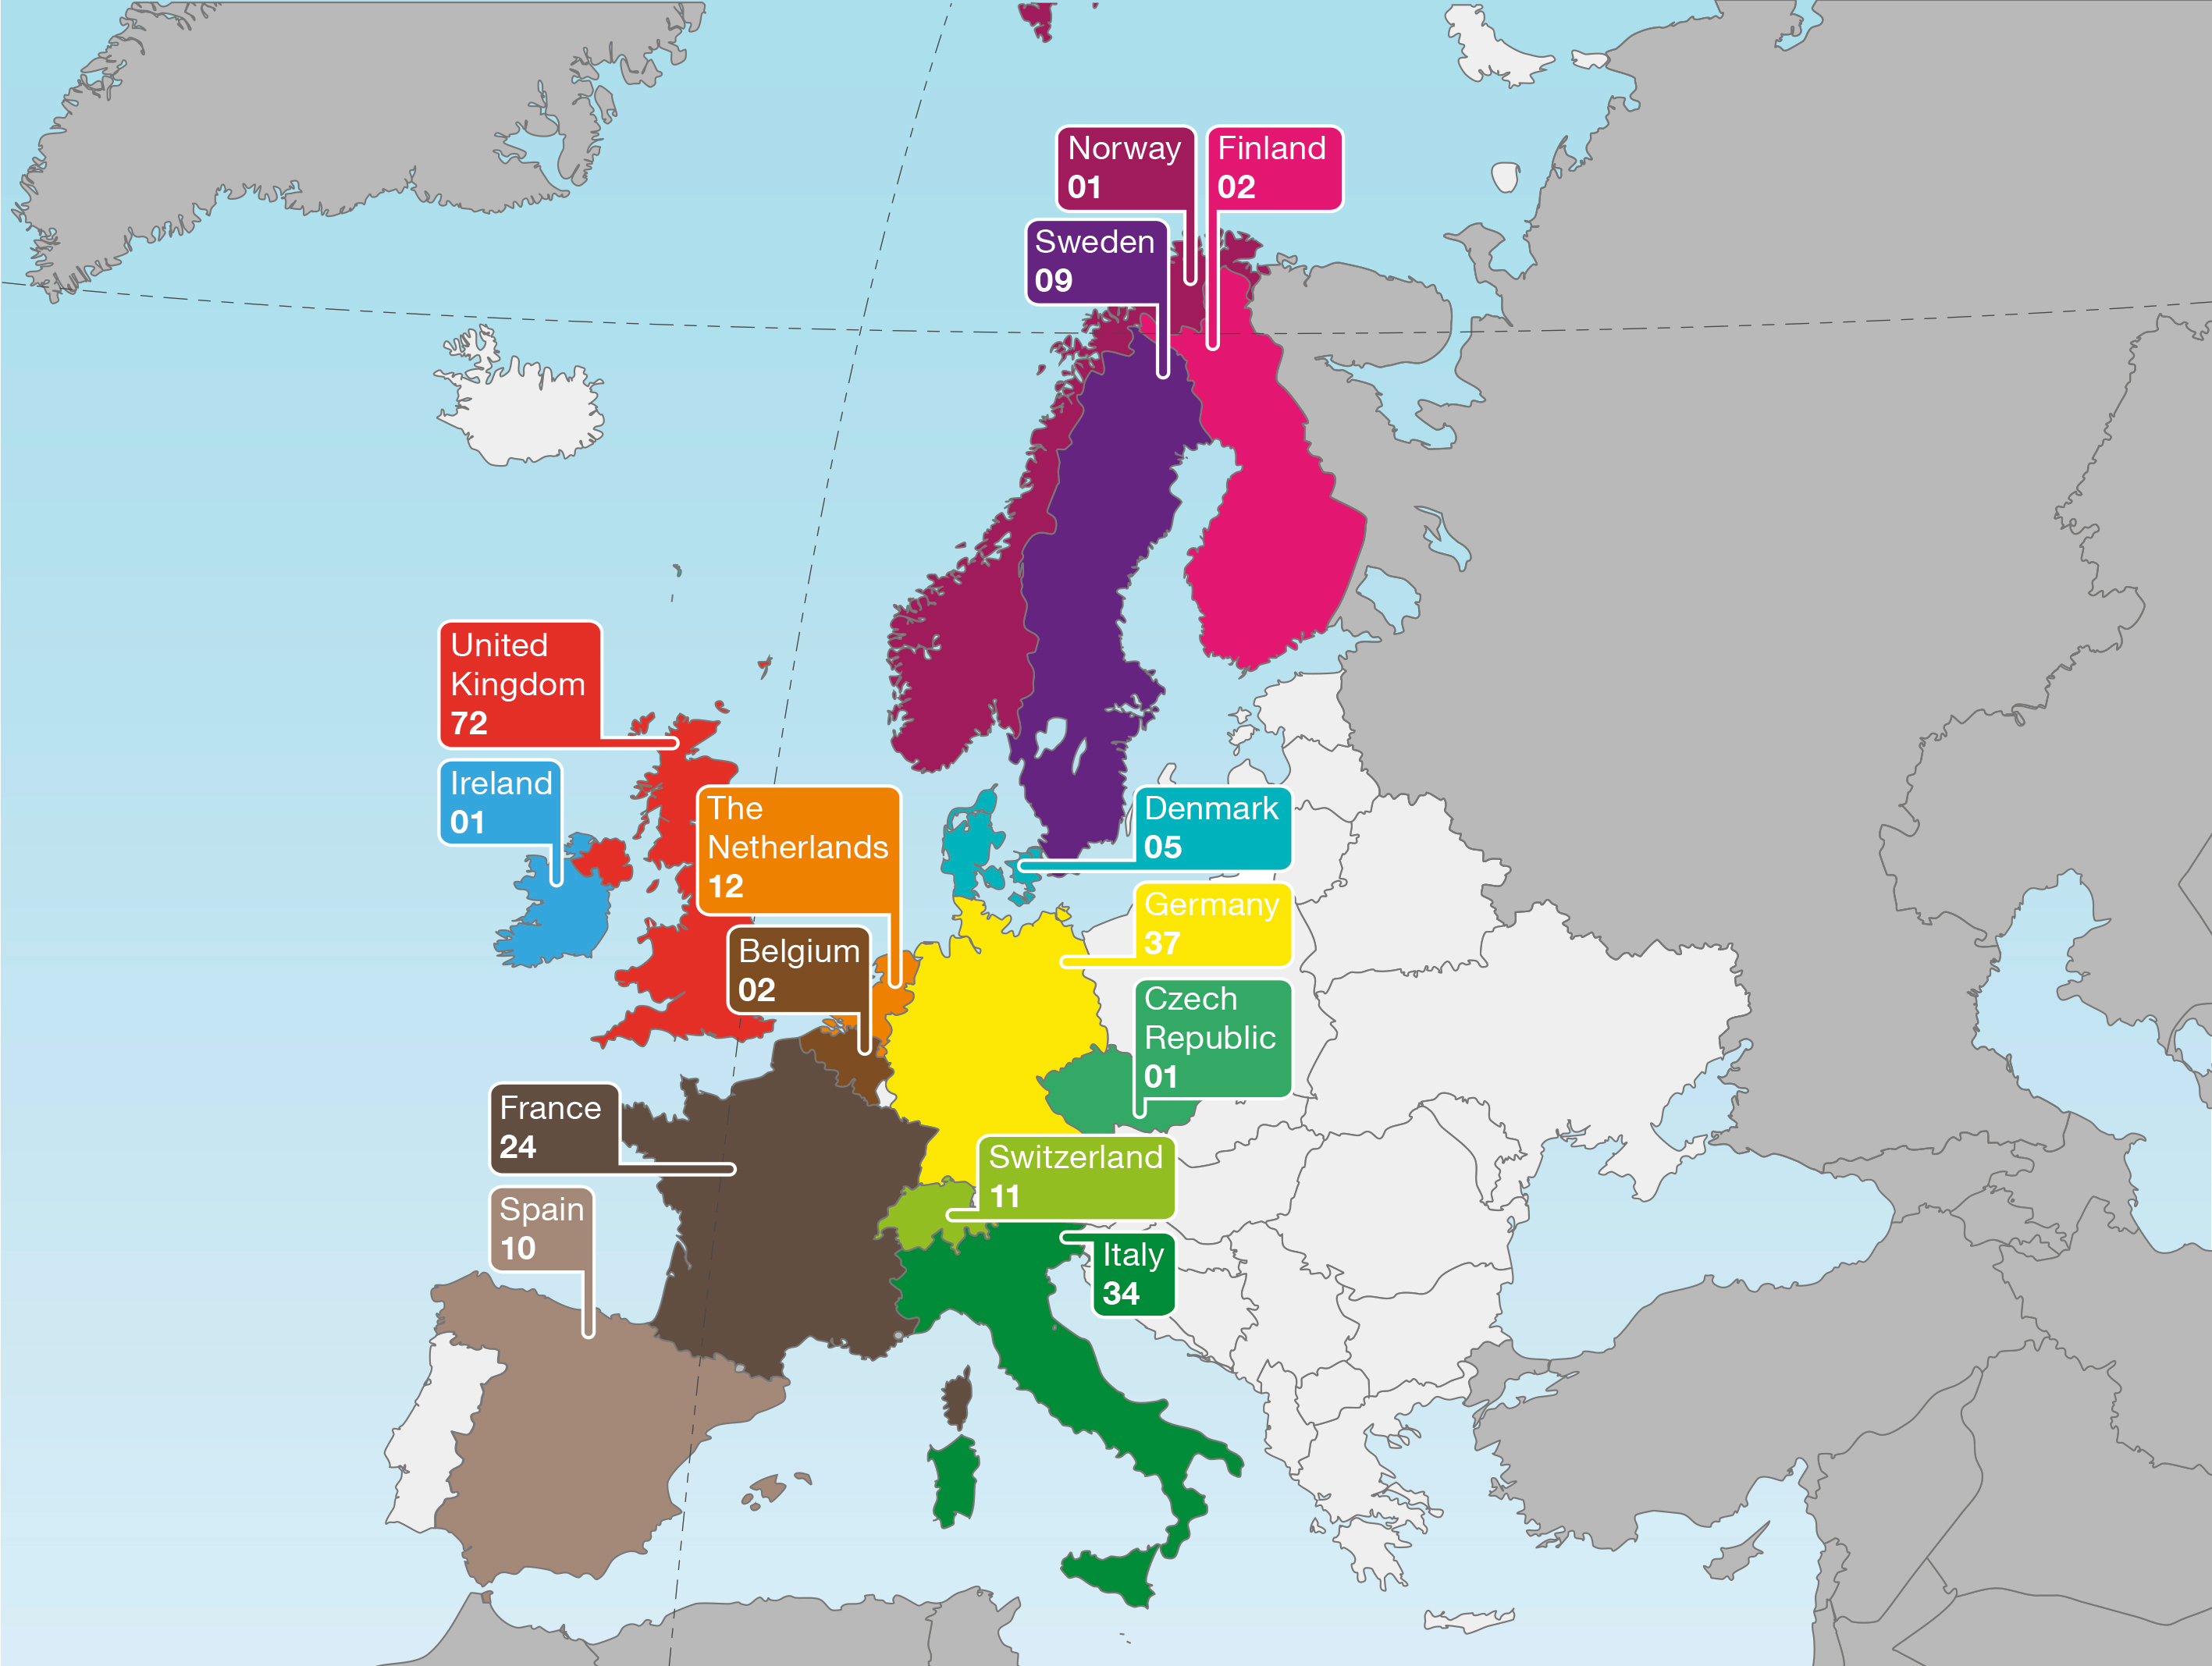

Geographical distribution of submitted proposals in Europe

This figure shows the geographical distribution in Europe of submitted proposals for Cycle 22, which will be discussed and ranked at the time allocation committee in June 2014. It indicates how well used the telescope is by nations such as the UK, Italy, France and Germany, among others.

Credit: NASA and ESA